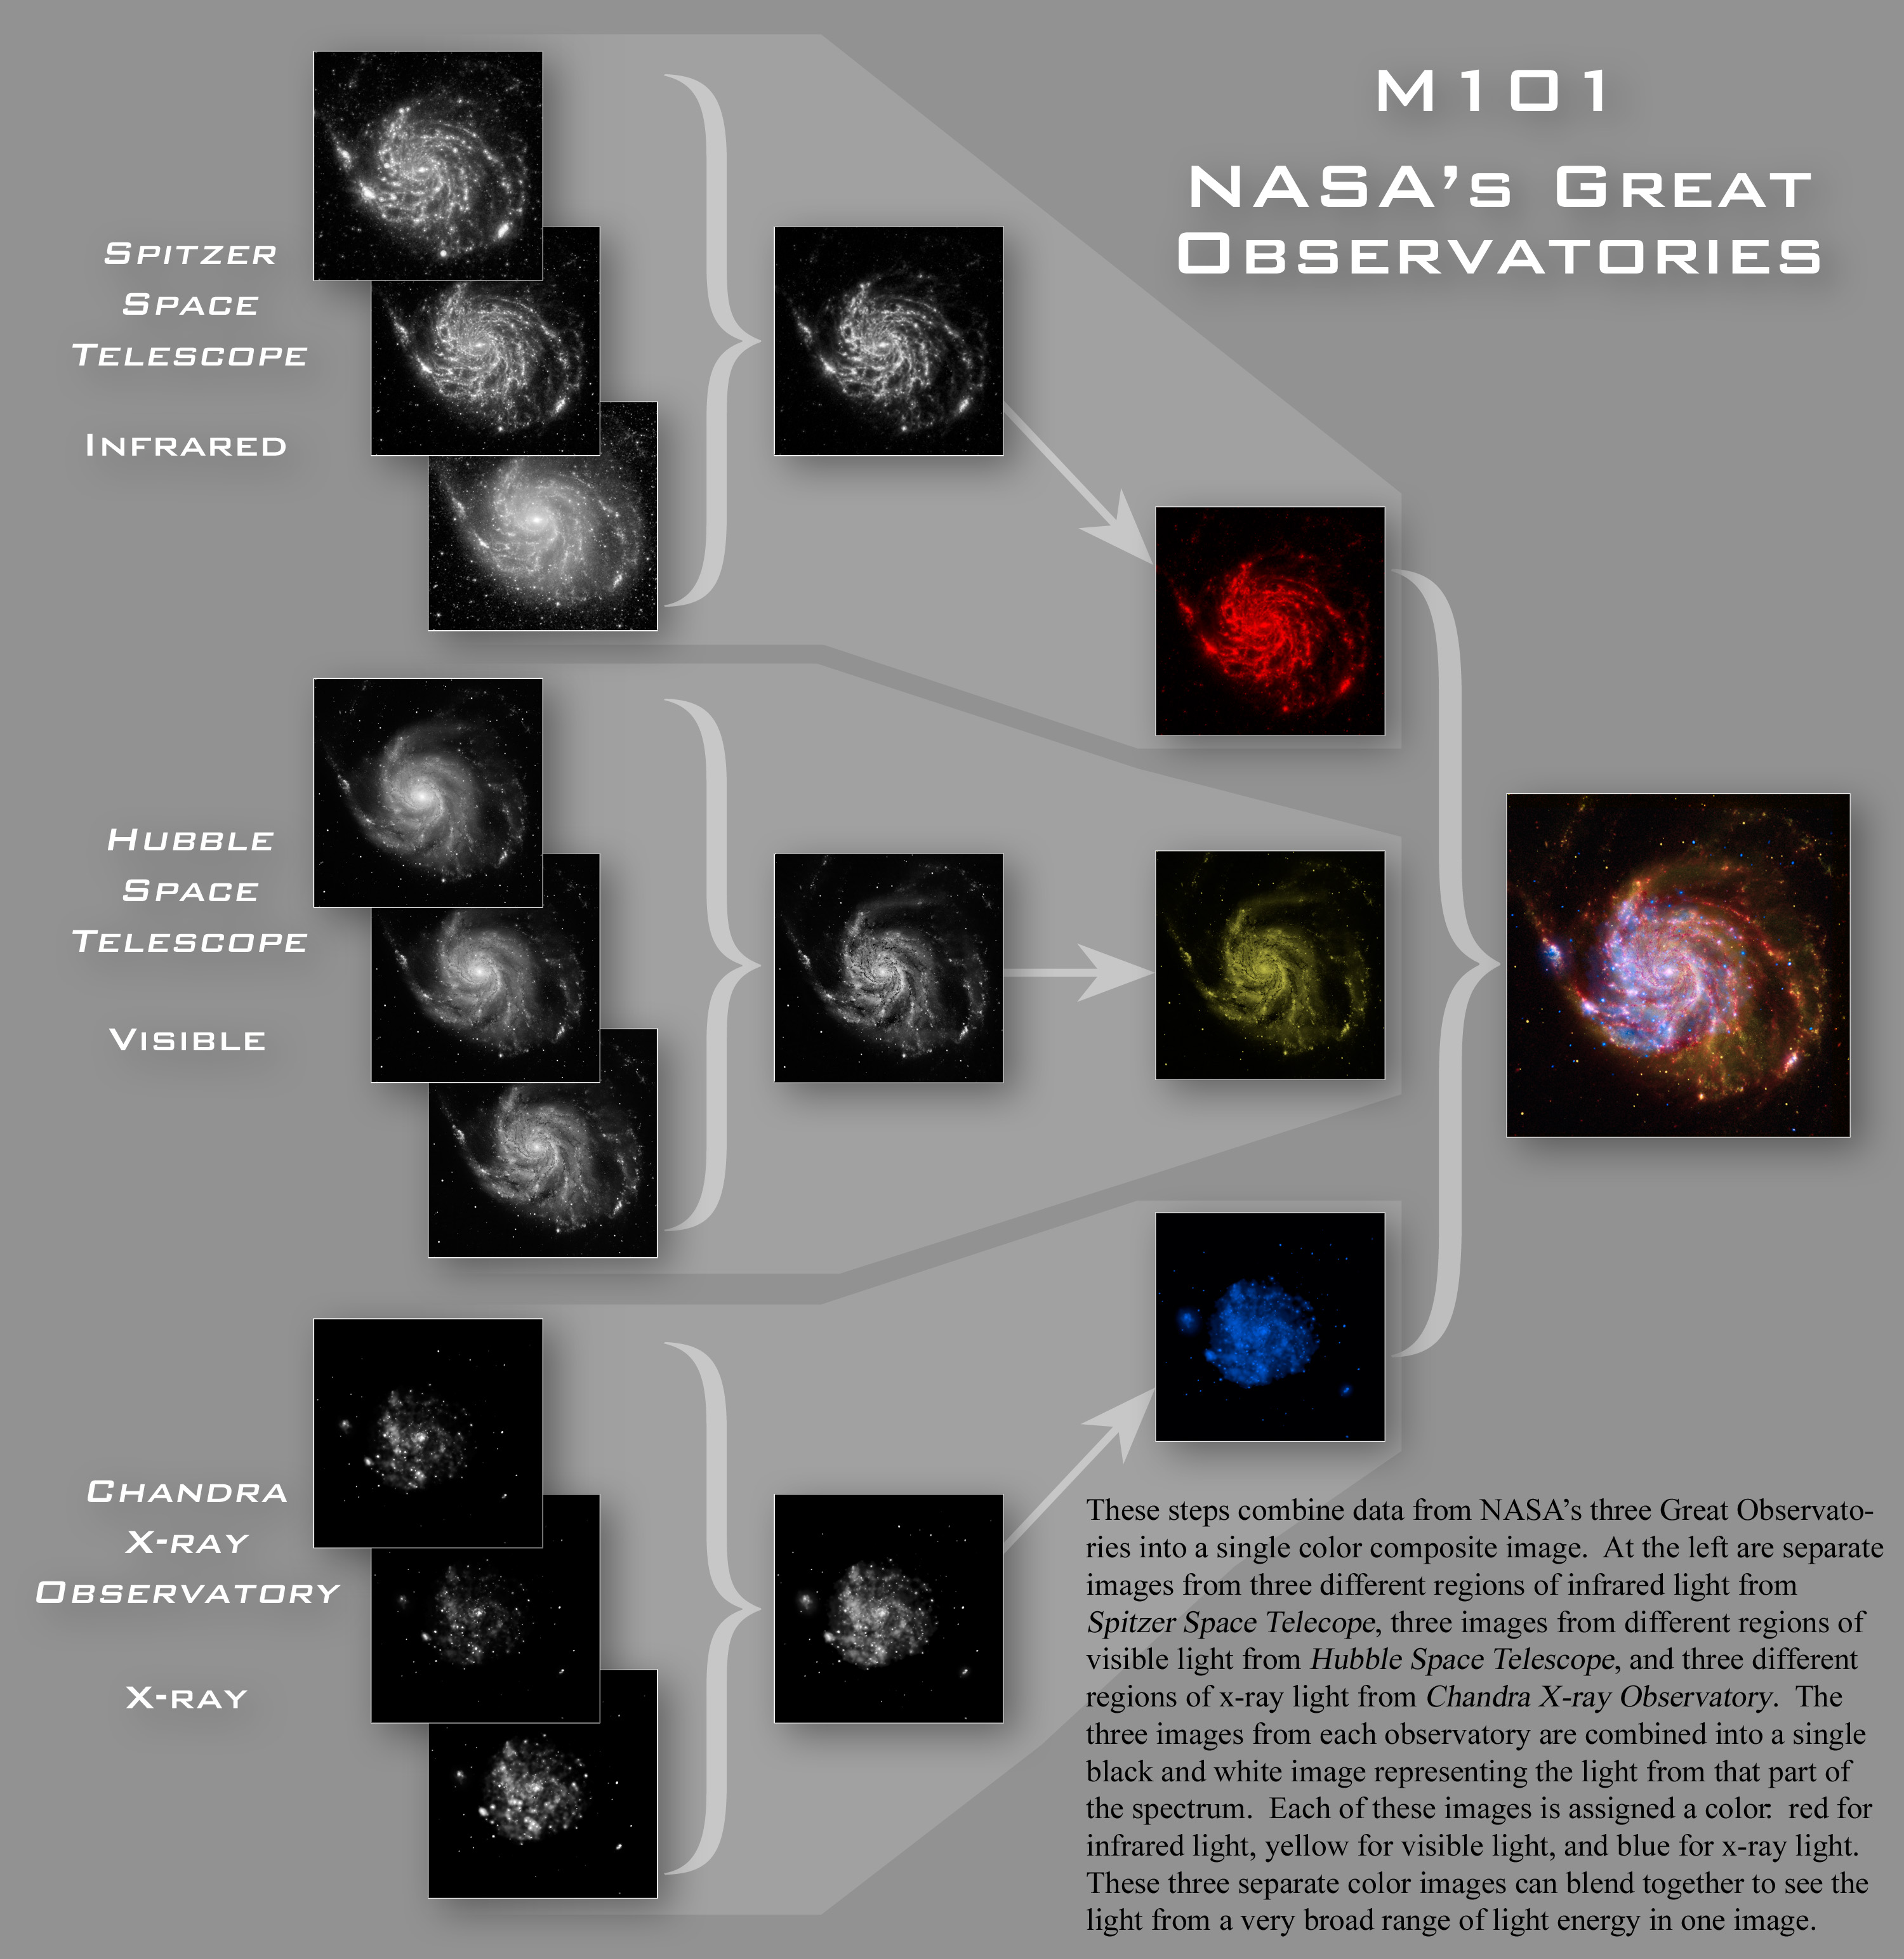

Construction of the Great Observatories M101 image

These steps combine data from NASA's three Great Observatories into a single colour composite image. At the left are separate images from three different regions of infrared light from the Spitzer Space Telescope, three images from different regions of visible light from the Hubble Space Telescope, and three different regions of x-ray light from the Chandra X-ray Observatory. The three images from each observatory are combined into a single black and white image representing the light from that part of the spectrum. Each of these images is assigned a colour: red for infrared light, yellow for visible light, and blue for x-ray light. These three separate colour images can blend together to see the light from a very broad range of light energy in one image.

Credit: NASA, ESA, CXC, SSC, and STScINASA, ESA and Z. Levay (STScI)